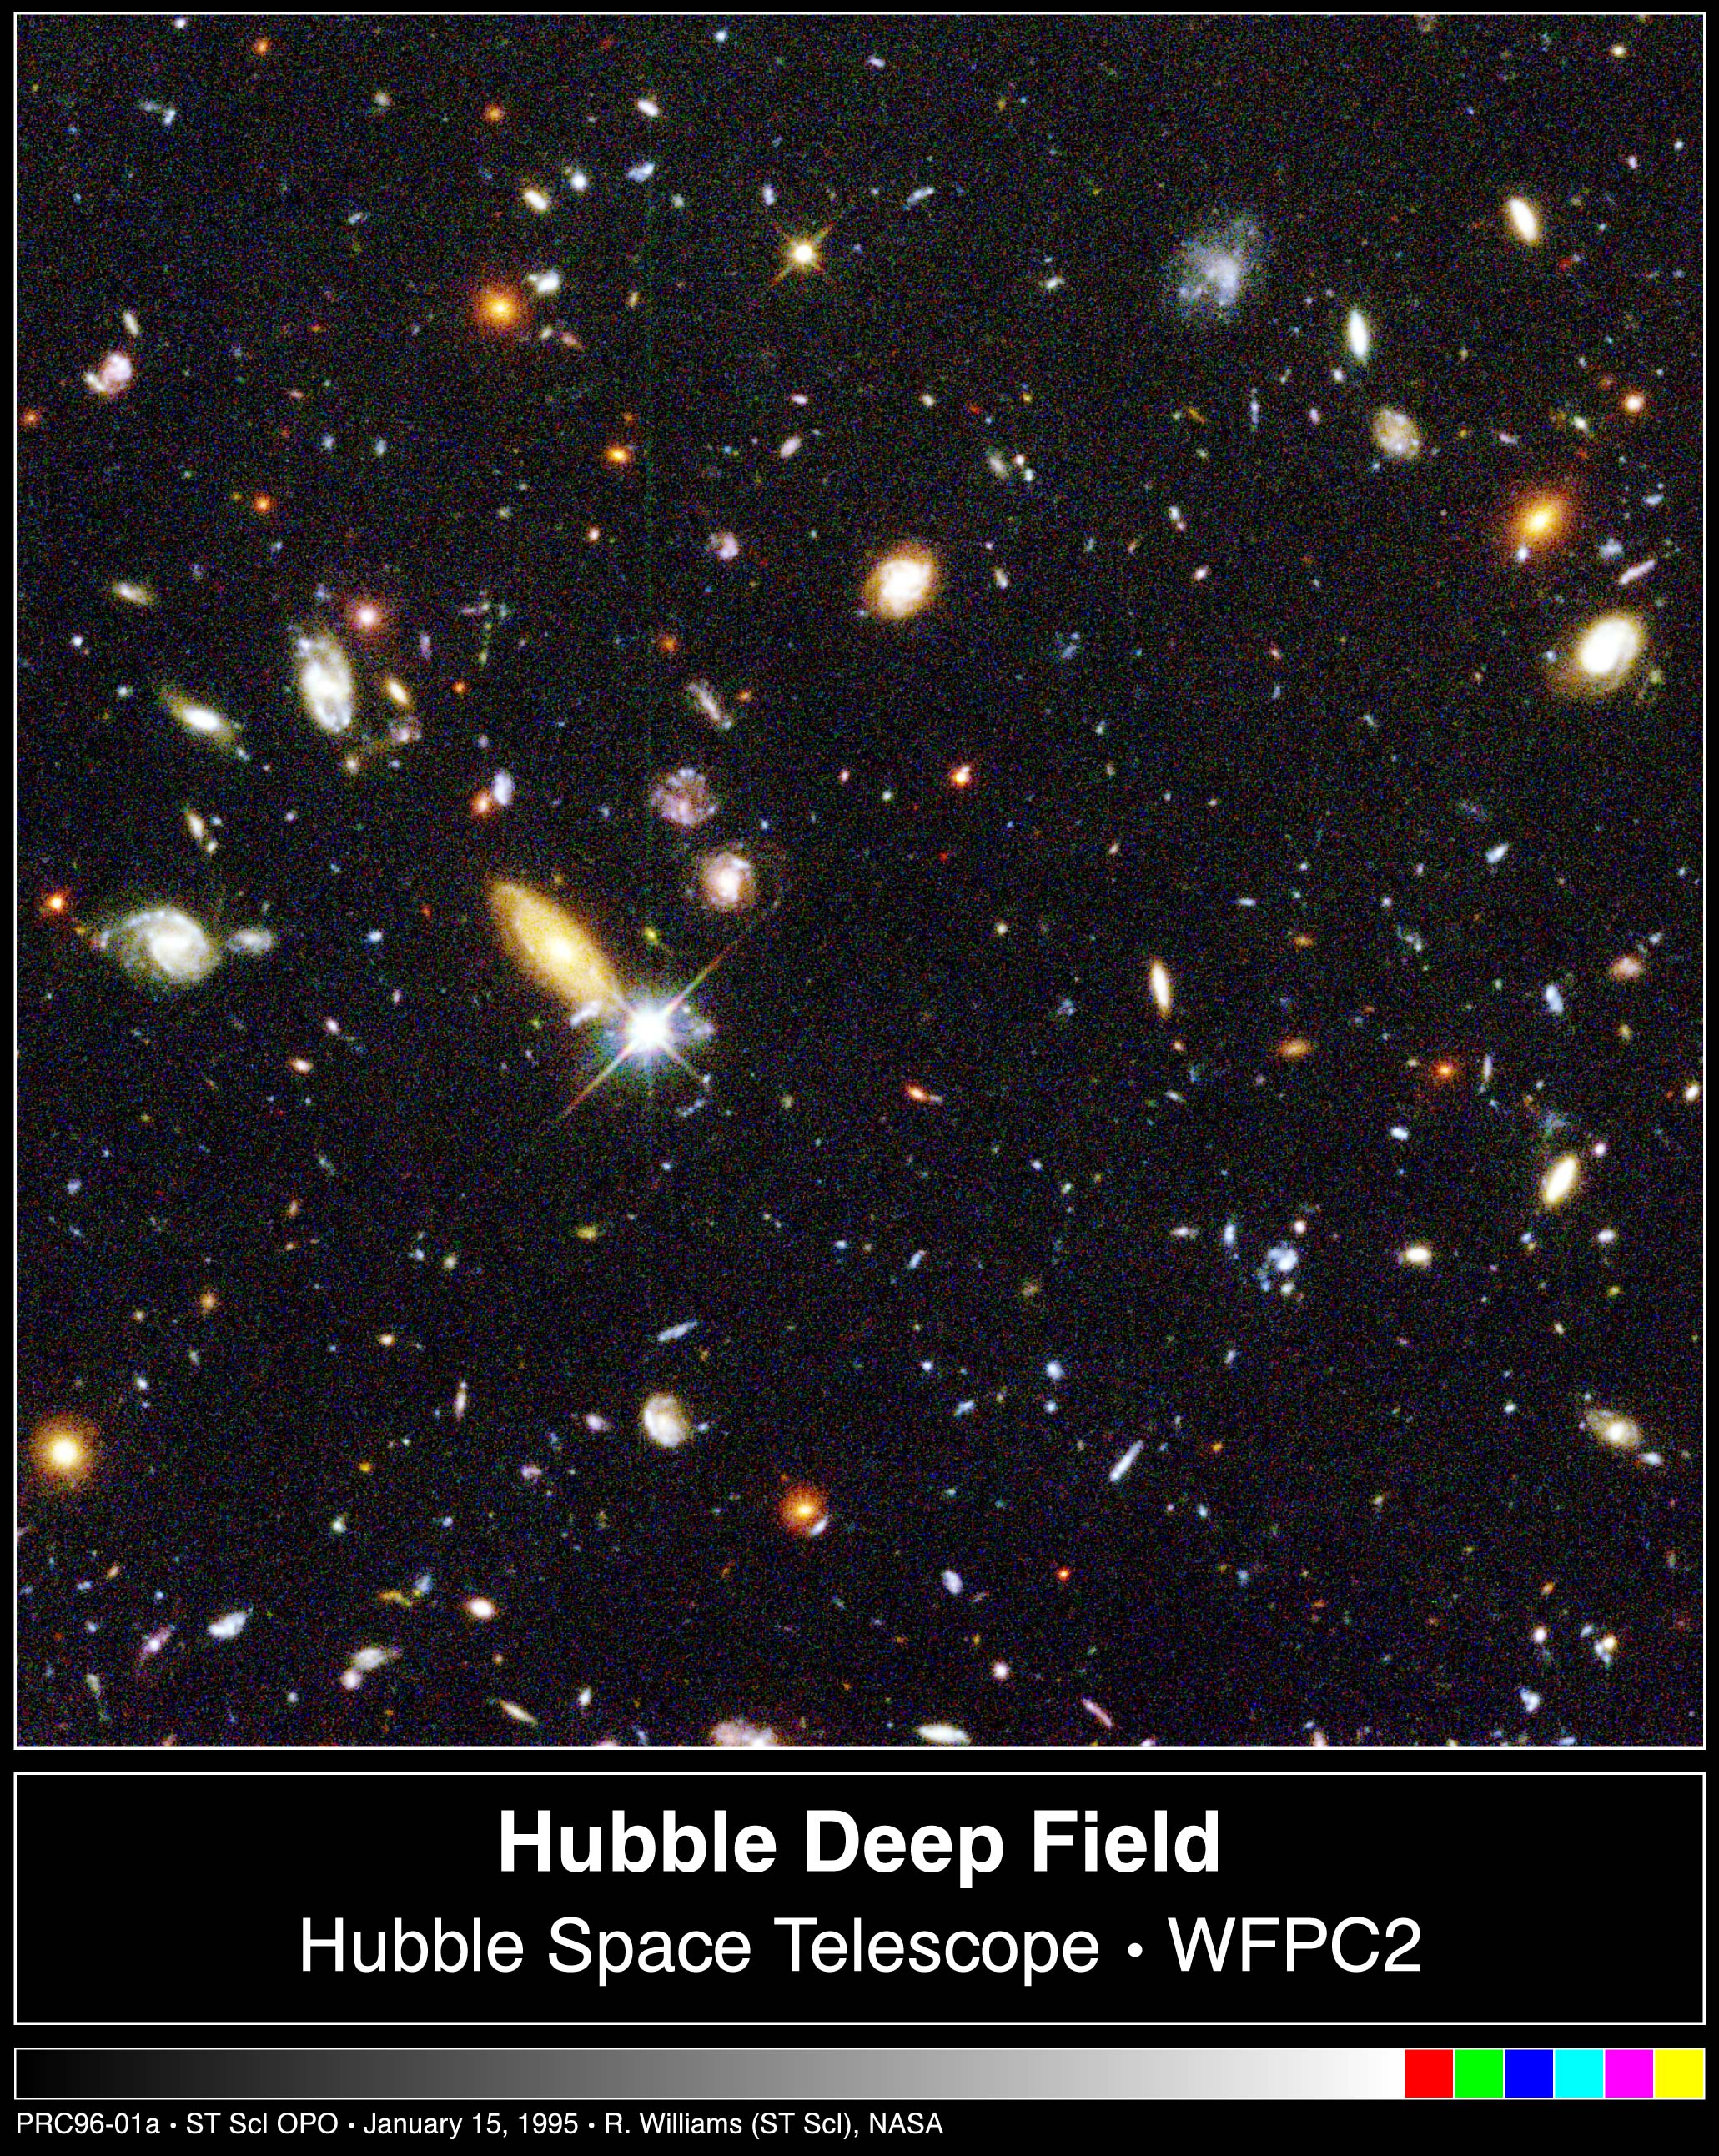

Hubble's Deepest-Ever View of the Universe Unveils Myriad Galaxies Back to the Beginning of Time

Several hundred never before seen galaxies are visible in this"deepest-ever" view of the universe, called the Hubble Deep Field(HDF), made with NASA/ESA Hubble Space Telescope. Besides the classicalspiral and elliptical shaped galaxies, there is a bewildering varietyof other galaxy shapes and colours that are important clues tounderstanding the evolution of the universe. Some of the galaxies mayhave formed less that one billion years after the Big Bang.

Representing a narrow "keyhole" view all the way to the visiblehorizon of the universe, the HDF image covers a speck of sky 1/30th thediameter of the full Moon (about 25% of the entire HDF is shown here).This is so narrow, just a few foreground stars in our Milky Way galaxyare visible and are vastly outnumbered by the menagerie of far moredistant galaxies, some nearly as faint as 30th magnitude, or nearlyfour billion times fainter than the limits of human vision. (Therelatively bright object with diffraction spikes just left of centermay be a 20th magnitude star.) Though the field is a very small sampleof sky area it is considered representative of the typical distributionof galaxies in space because the universe, statistically, looks thesame in all directions.

Credit: Robert Williams and the Hubble Deep Field Team (STScI) and NASA/ESA